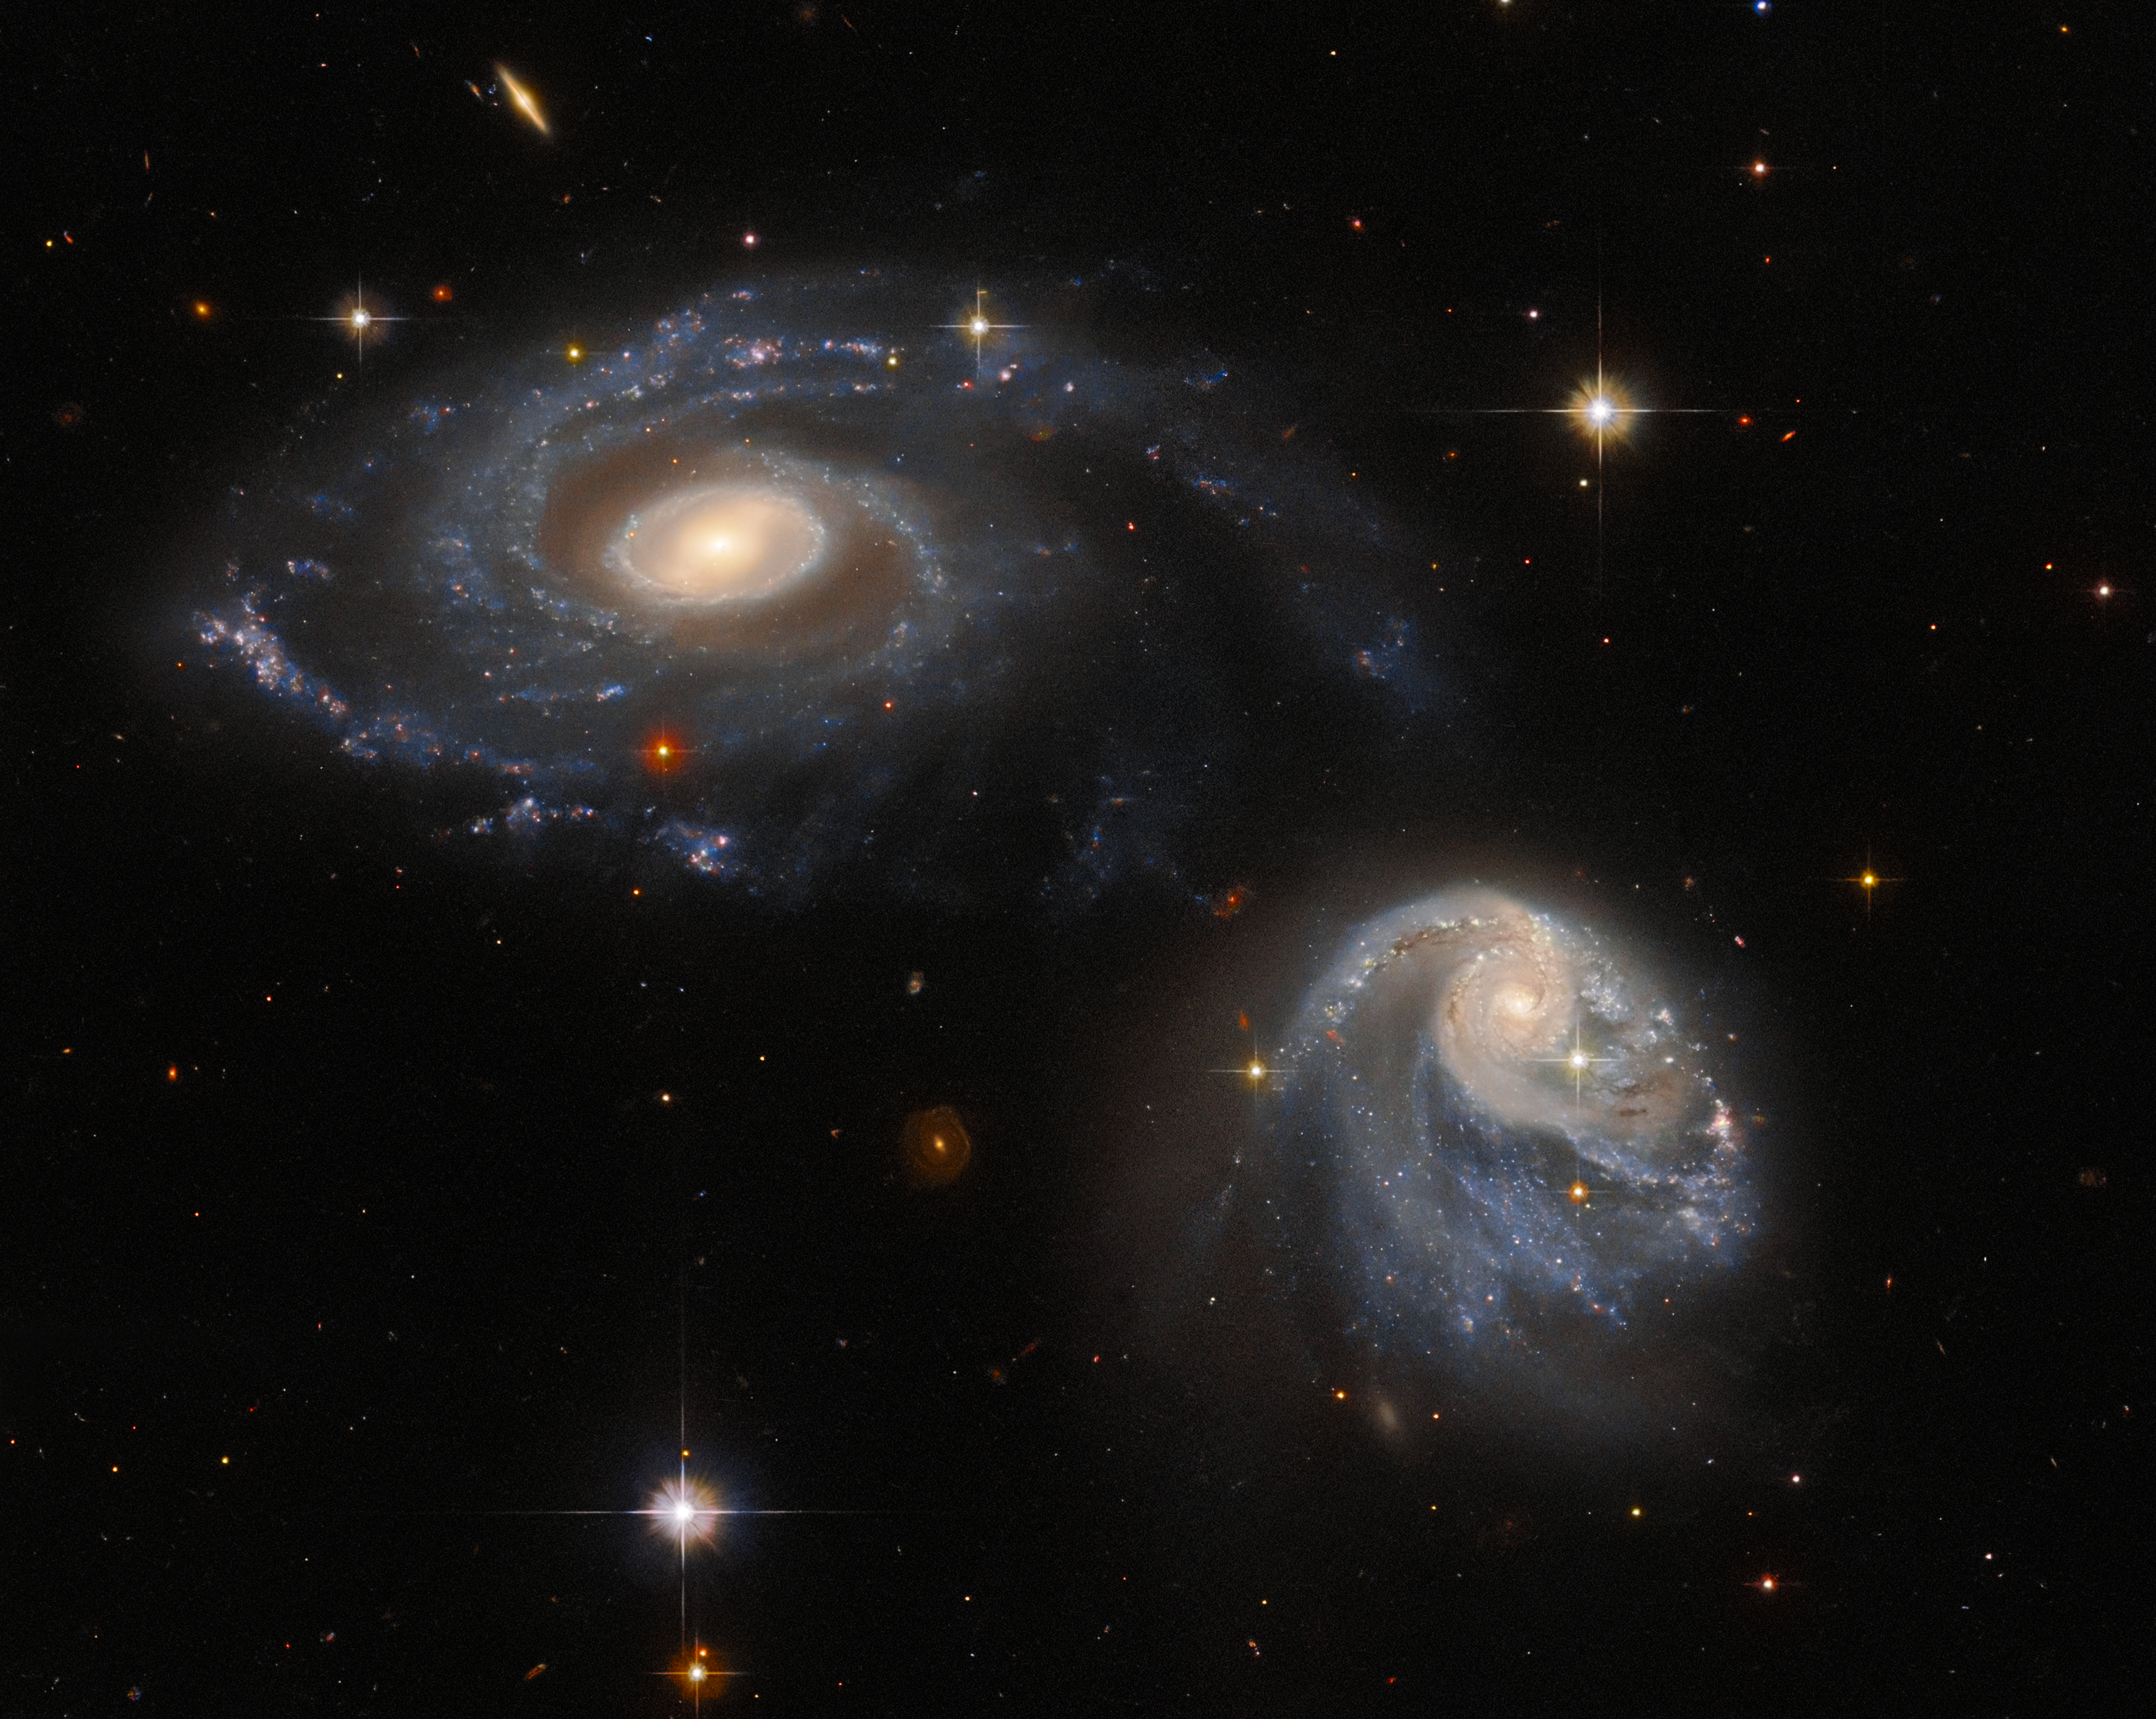

A Snapshot of Interacting Galaxies

The two interacting galaxies making up the pair known as Arp-Madore 608-333 seem to float side by side in this image from the NASA/ESA Hubble Space Telescope. Though they appear serene and unperturbed, the two are subtly warping one another through a mutual gravitational interaction that is disrupting and distorting both galaxies. This drawn-out galactic interaction was captured by Hubble’s Advanced Camera for Surveys.

The interacting galaxies in Arp-Madore 608-333 were captured as part of an effort to build up an archive of interesting targets for more detailed future study with Hubble, ground-based telescopes, and the NASA/ESA/CSA James Webb Space Telescope. To build up this archive, astronomers scoured existing astronomical catalogues for a list of targets spread throughout the night sky. By so doing, they hoped to include objects that had already been identified as interesting and that would be easy for Hubble to observe no matter which direction it was pointing.

Deciding how to award Hubble observing time is a drawn-out, competitive and difficult process, and the observations are allocated so as to use every last second of Hubble time available. However, there is a small but persistent fraction of time — around 2–3% — that goes unused as Hubble turns to point at new targets. Snapshot programmes, such as the one which captured Arp-Madore 608-333, exist to fill this gap and take advantage of the moments between longer observations. As well as creating beautiful images such as this, these snapshot programs enable astronomers to gather as much data as possible with Hubble.

Credit: ESA/Hubble & NASA, Dark Energy Survey/DOE/FNAL/DECam/CTIO/NOIRLab/NSF/AURA, J. Dalcanton